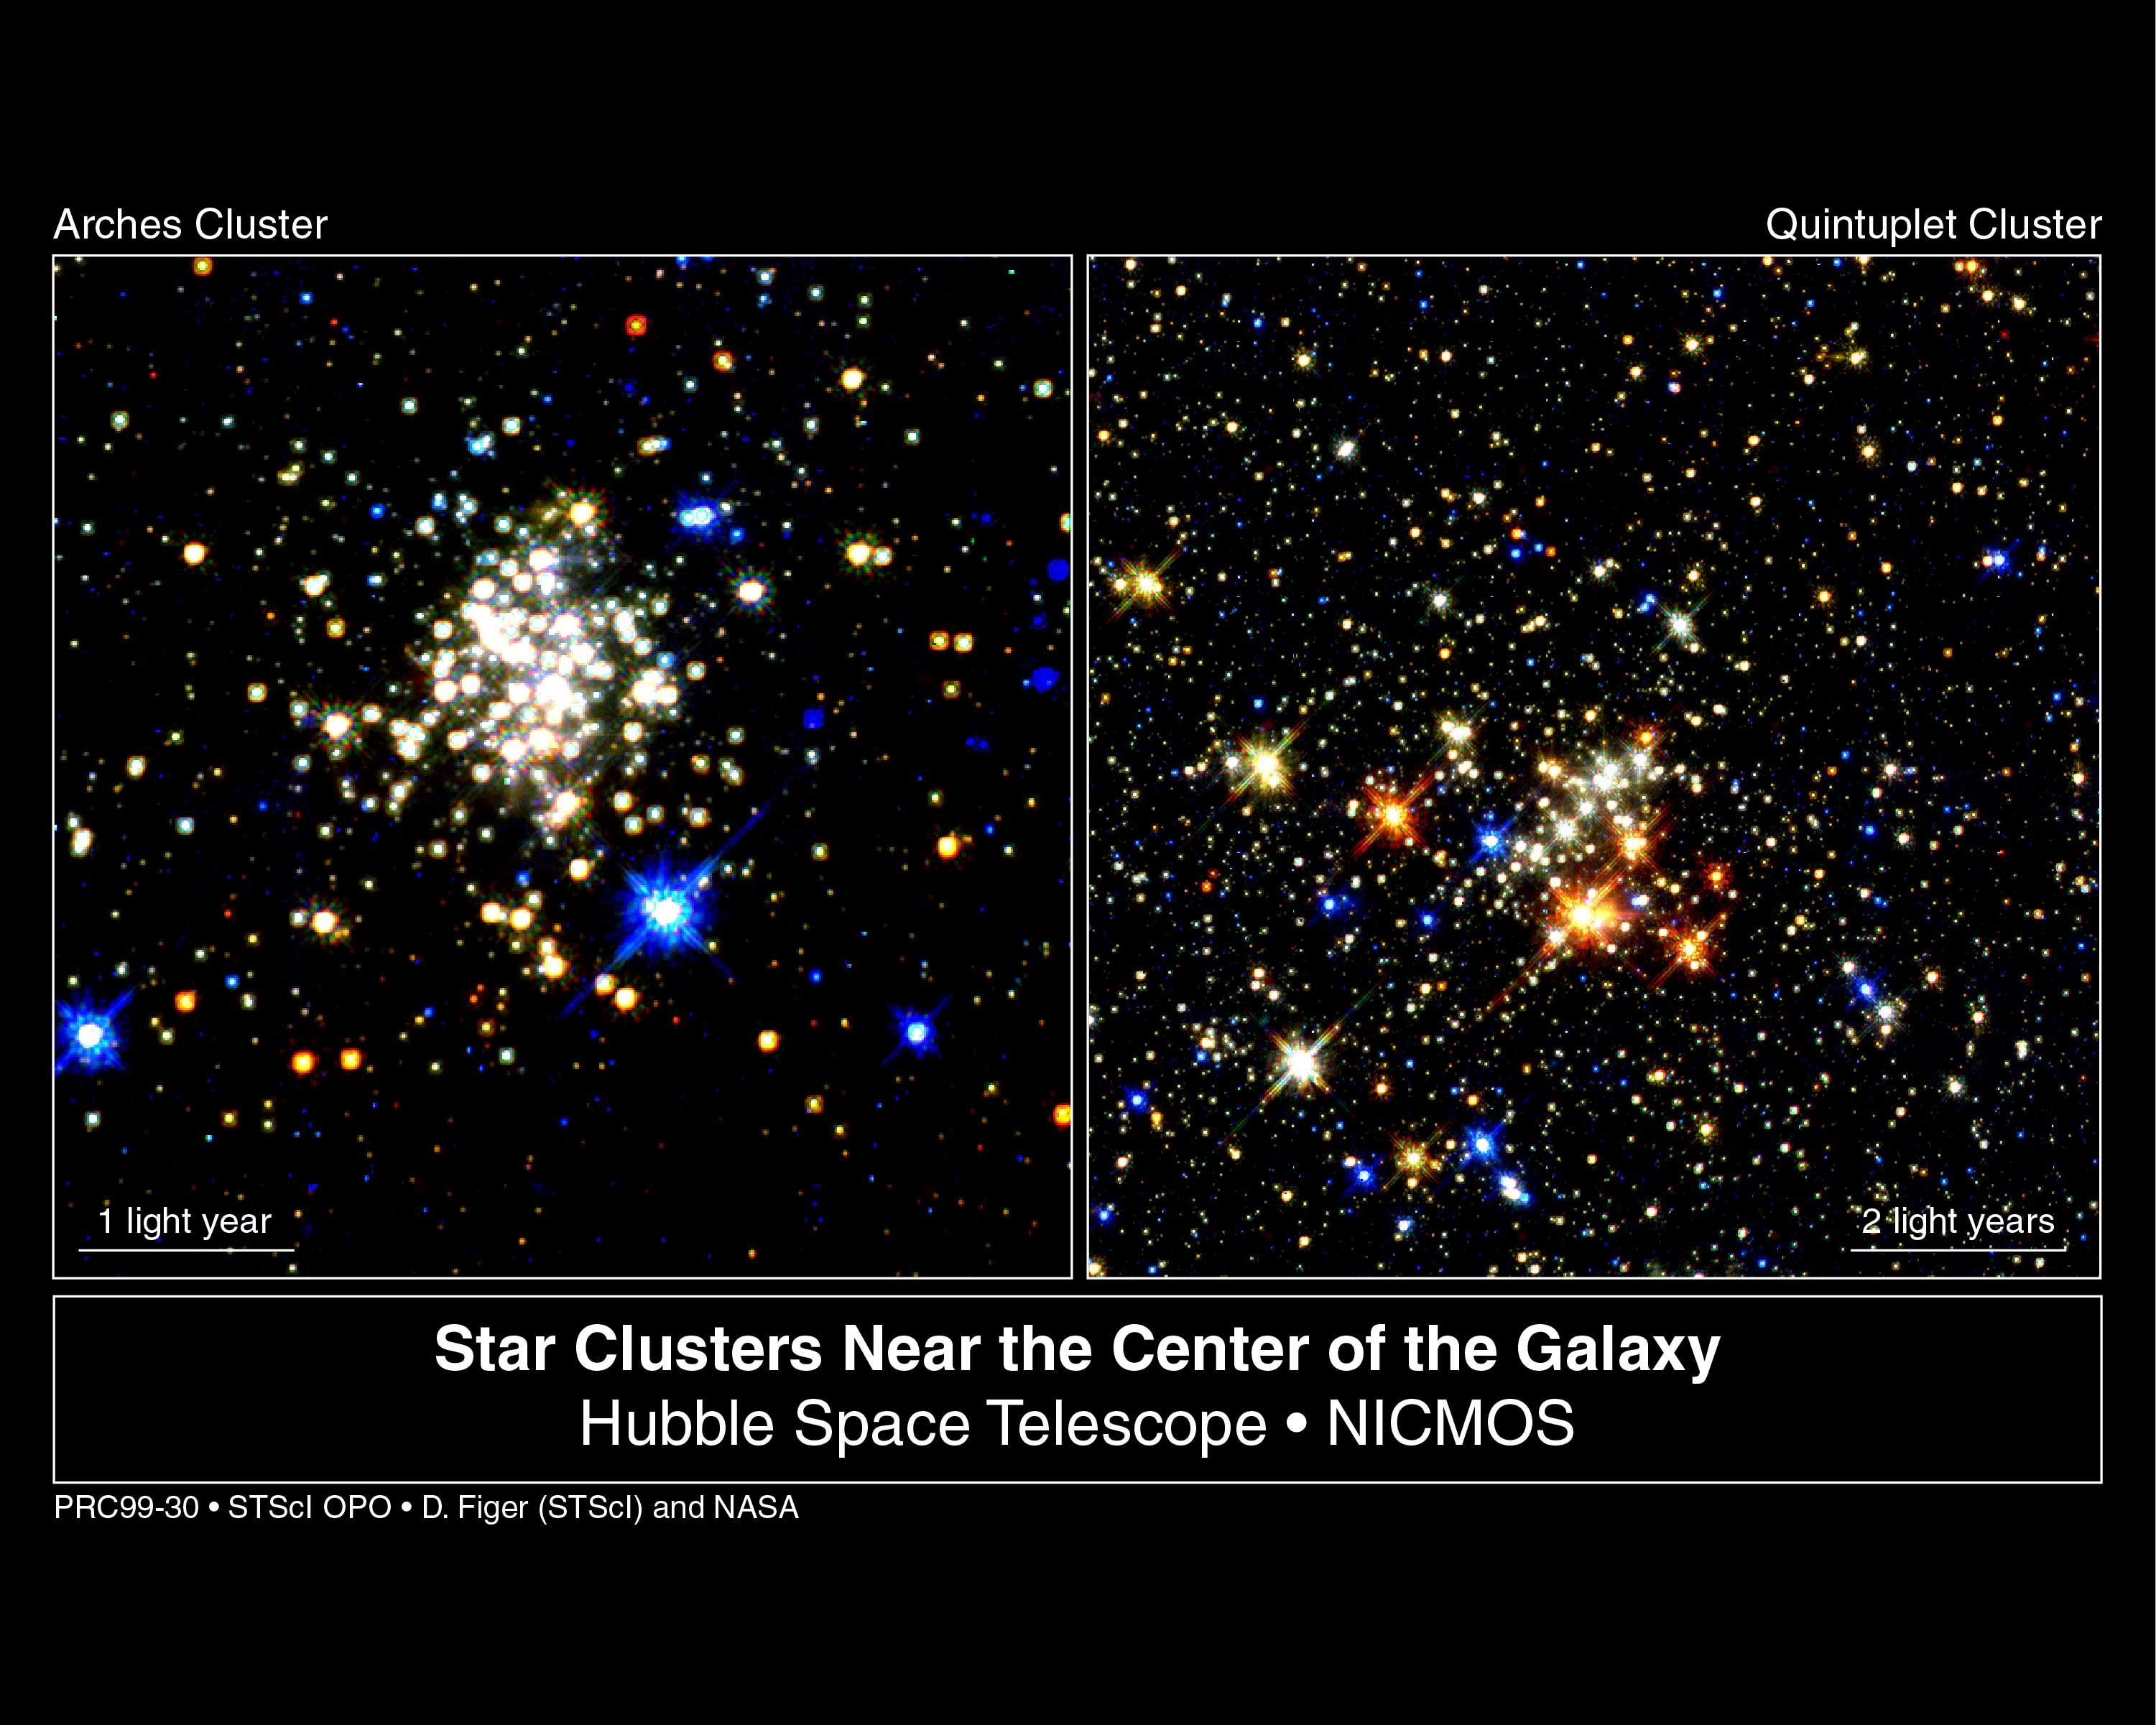

Star clusters near the center of the galaxy

Penetrating 25, 000 light-years of obscuring dust and myriad stars, the NASA/ESA Hubble Space Telescope has provided the clearest view yet of a pair of the largest young clusters of stars inside our Milky Way galaxy, located less than 100 light-years from the very centre of the Galaxy. Having the equivalent mass greater than 10, 000 stars like our sun, the monster clusters are ten times larger than typical young star clusters scattered throughout our Milky Way. Both clusters are destined to be ripped apart in just a few million years by gravitational tidal forces in the galaxy's core. But in the brief time they are around, they shine more brightly than any other star cluster in the Galaxy.

Credit: Don Figer ( Space Telescope Science Institute) and NASA/ESA